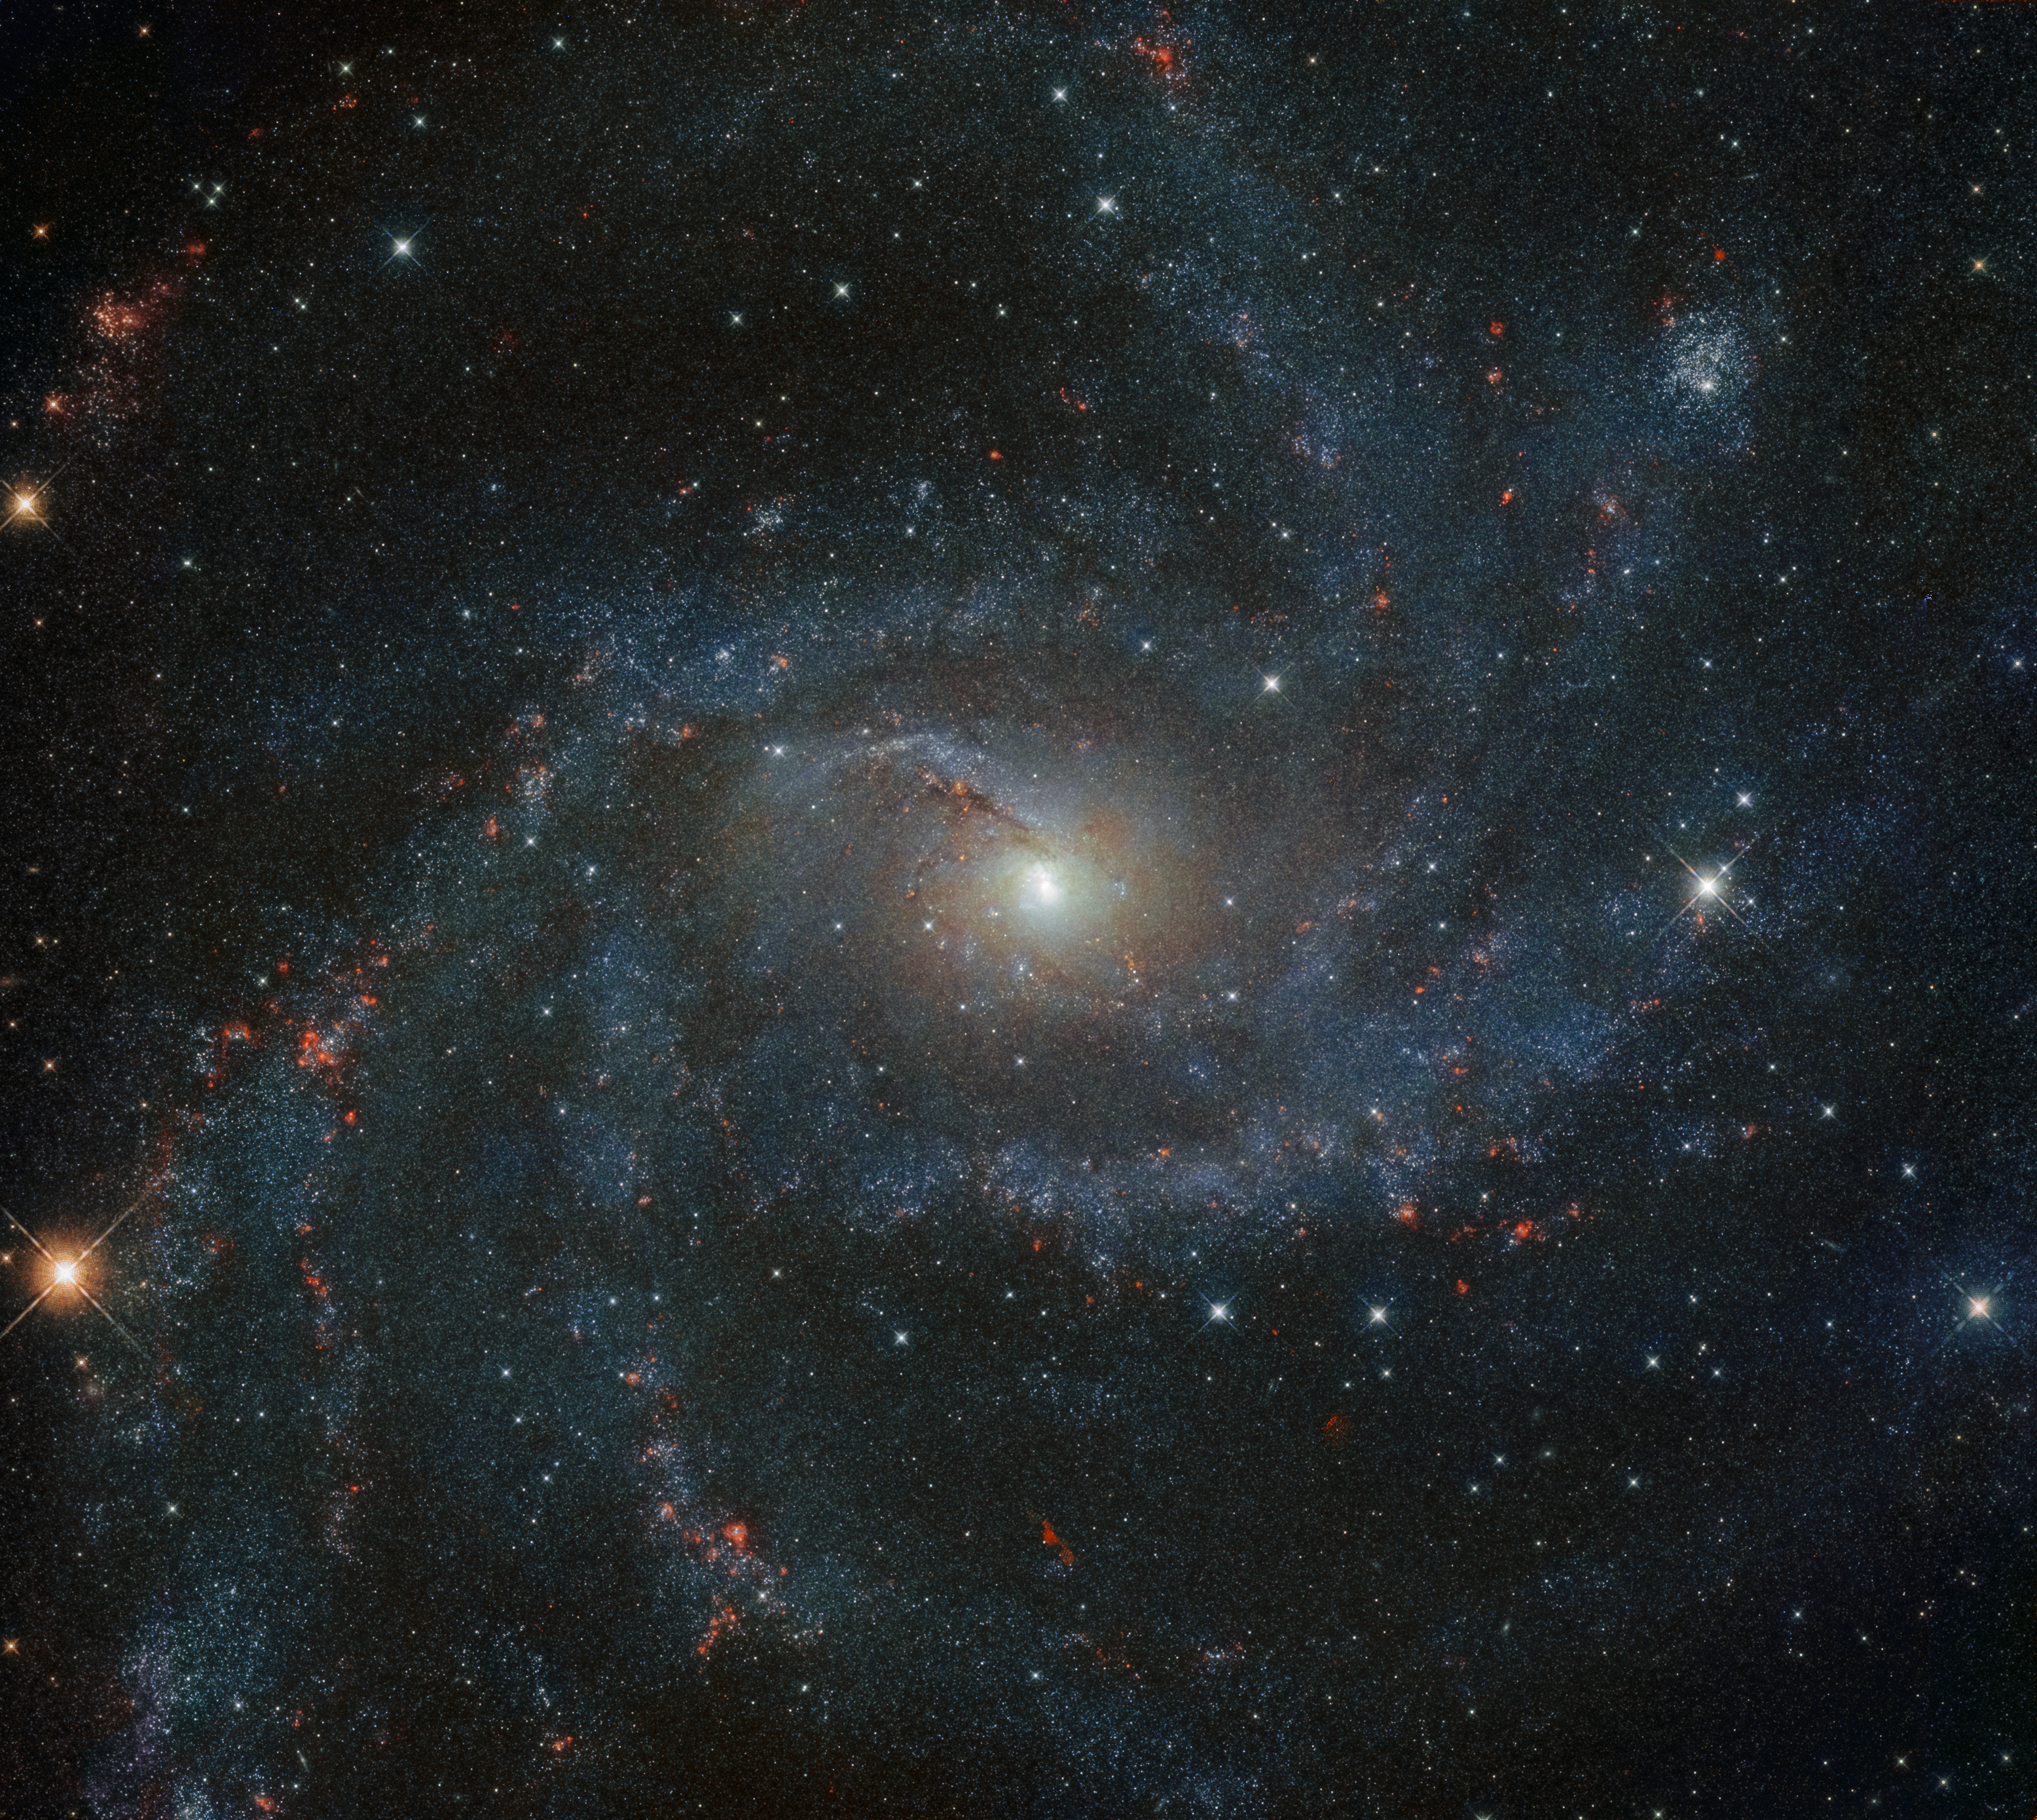

A Galaxy to Take Your Breath Away

The galaxy NGC 6946 is nothing short of spectacular. In the last century alone, NGC 6946 has experienced 10 observed supernovae, earning its nickname as the Fireworks Galaxy. In comparison, our Milky Way averages just 1-2 supernova events per century. This NASA/ESA Hubble Space Telescope image shows the stars, spiral arms, and various stellar environments of NGC 6946 in phenomenal detail.

We are able to marvel at NGC 6946 as it is a face-on galaxy, which means that we see the galaxy “facing” us, rather than seeing it from the side (known as edge-on). The Fireworks Galaxy is further classified as an intermediate spiral galaxy and as a starburst galaxy. The former means the structure of NGC 6946 sits between a full spiral and a barred spiral galaxy, with only a slight bar in its centre, and the latter means it has an exceptionally high rate of star formation.

The galaxy resides 25.2 million light-years away, along the border of the northern constellations of Cepheus and Cygnus (The Swan).

Credit: ESA/Hubble & NASA, A. Leroy, K. S. Long